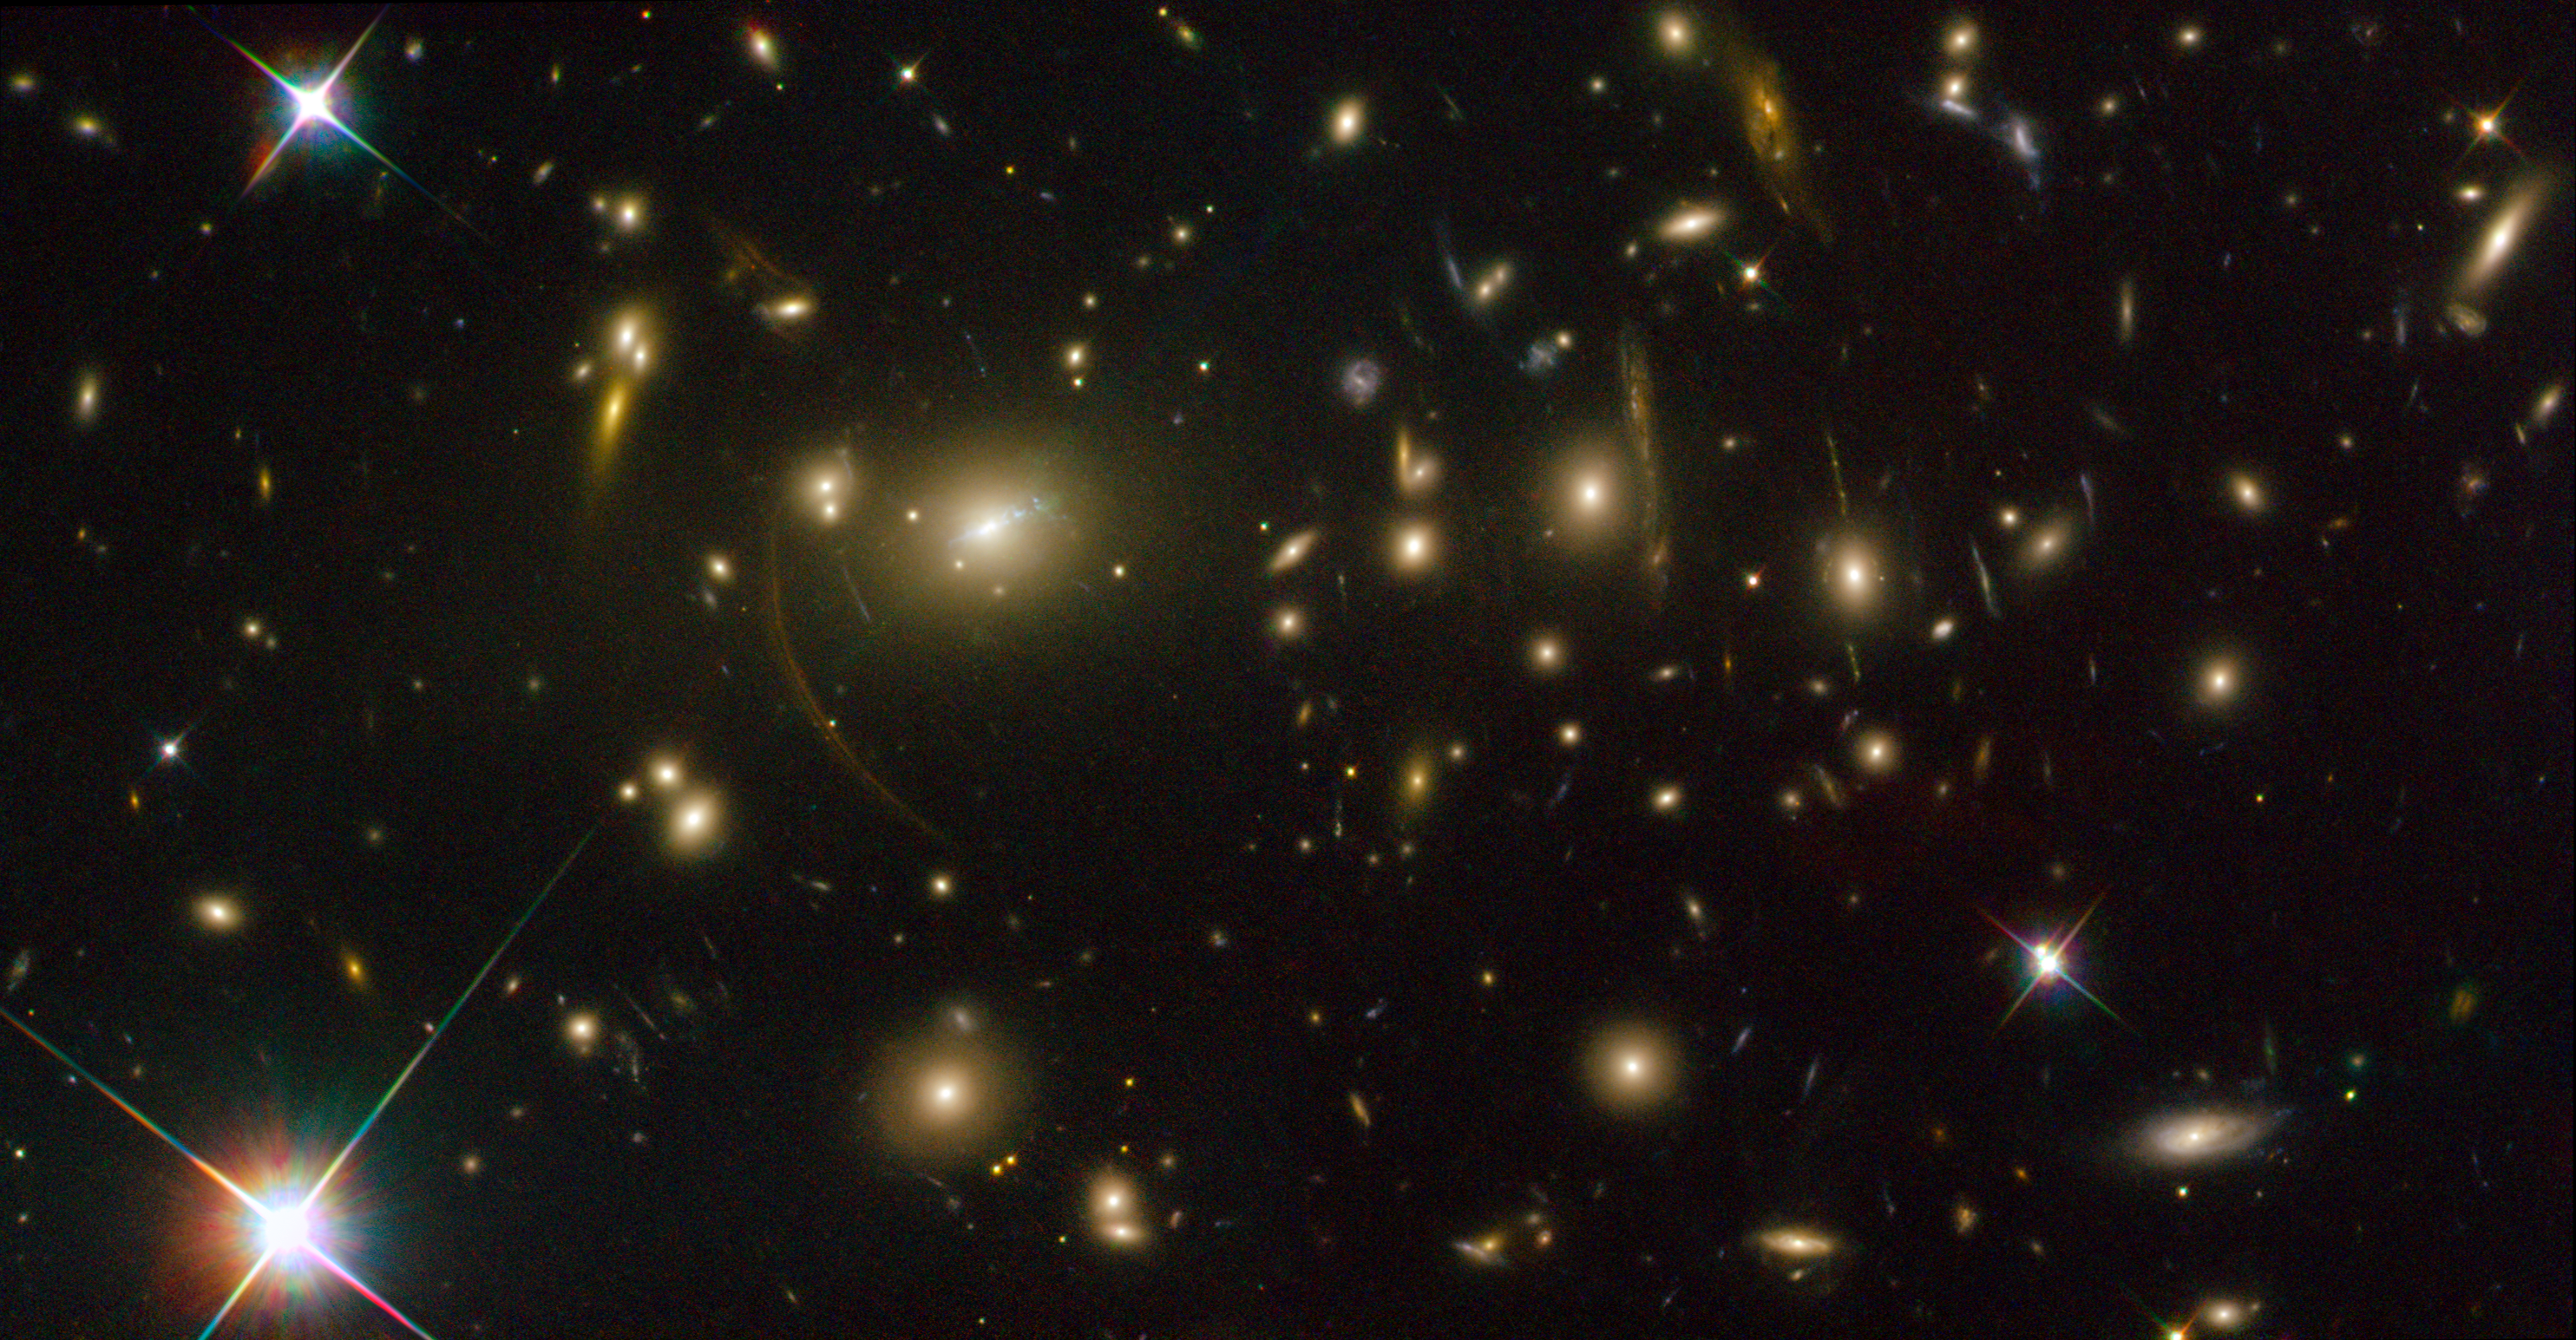

Abell 2390

Located 2.7 billion light-years from the Earth (redshift 0.23), Abell 2390 is located in the constellation Pegasus. The large arcs seen around the central cluster are distortions of other objects located behind Abell 2390, the light from which is bent and magnified as it passes by the galaxy cluster. When a massive galaxy cluster acts as a lens, like in these new Hubble images, arcs and arclets of light are formed. The images come in different sizes and shapes depending on how distant they are from us and each other and how close the source light passes by the galaxy cluster itself. The extent to which the image is distorted and the number of copies of the background object created depend on the alignment between the galaxy cluster and the distant body.

Credit: NASA, ESA, and Johan Richard (Caltech, USA) Acknowledgement: Davide de Martin & James Long (ESA/Hubble)